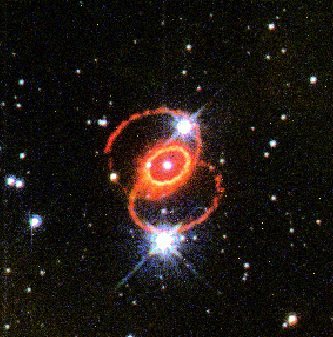

Supernova 1987a

This image, taken with Hubble's Wide Field and Planetary Camera 2in 1995, shows the orange-red rings surrounding Supernova 1987A in the Large Magellanic Cloud. The glowing debris of the supernova explosion, which occurred in February 1987, is at the center of the inner ring. The small white square indicates the location of the STIS aperture used for the new far-ultraviolet observation.

Credit: George Sonneborn (Goddard Space Flight Center), Jason Pun (NOAO), the STIS Instrument Definition Team, and NASA/ESA